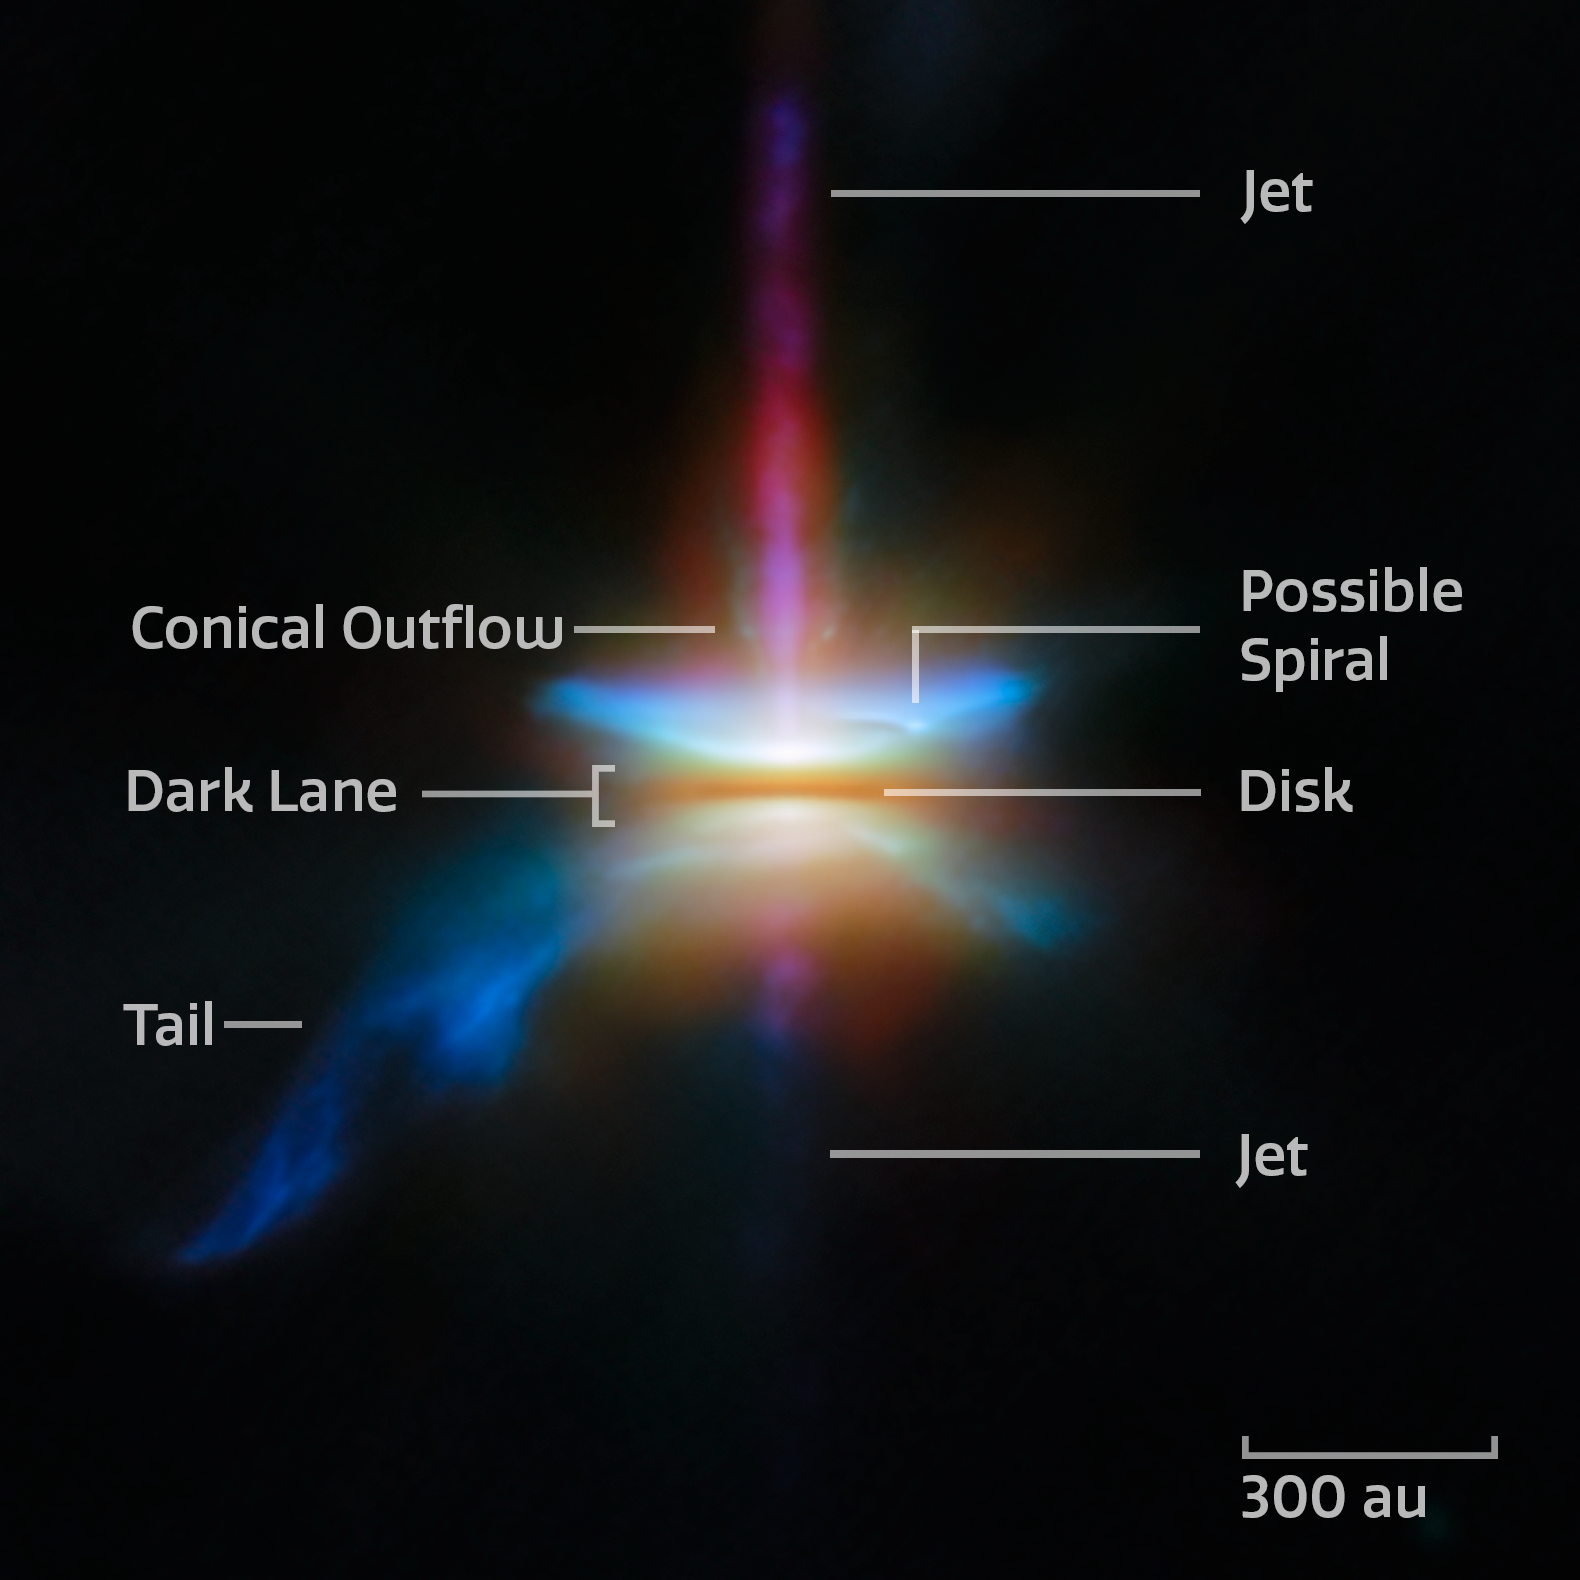

Webb spies a multifaceted disc

This new NASA/ESA/CSA James Webb Space Telescope Picture of the Month presents HH 30 in unprecedented resolution. This target is an edge-on protoplanetary disc that is surrounded by jets and a disc wind, and is located in the dark cloud LDN 1551 in the Taurus Molecular Cloud.

Herbig-Haro objects are small nebulae found in star formation regions, marking the locations where gas outflowing from young stars is heated into luminescence by shockwaves. HH 30 is an example of where this outflowing gas takes the form of a narrow jet. The source star is located on one end of the jet, hidden behind an edge-on protoplanetary disc that the star is illuminating.

HH 30 is of particular interest to astronomers. In fact, the HH 30 disc is considered the prototype of an edge-on disc, thanks to its early discovery with the NASA/ESA Hubble Space Telescope. Discs seen from this view are a unique laboratory to study the settling and drift of dust grains.

An international team of astronomers have used Webb to investigate the target in unprecedented detail. By combining Webb’s observations with those from the Hubble Space Telescope and the Atacama Large Millimeter/submillimeter Array (ALMA), the team was able to study the multiwavelength disc appearance of the system and its dynamic structures.

These Webb observations were taken as part of the Webb GO programme #2562 (PI F. Ménard, K. Stapelfeldt), which aims to understand how dust evolves in edge-on discs like HH 30. Combined with the keen radio-wavelength eyes of ALMA, these observations show that large dust grains must migrate within the disc and settle in a thin layer. The creation of a narrow, dense layer of dust is an important stage in the process of planet formation. In this dense region, dust grains clump together to form pebbles and eventually planets themselves.

In addition to the behaviour of dust grains, the Webb, Hubble, and ALMA images reveal several distinct structures that are nested within one another. Emerging at a 90-degree angle from the narrow central disc is a high-velocity jet of gas. The Webb data showed that clumps of gas within the jet are moving at 121 kilometres per second. The narrow jet is surrounded by a wider, cone-shaped outflow. Enclosing the conical outflow is a broad nebula that reflects the light from the young star that is embedded within the disc. This structure shows a hint of a spiral, similar to what is seen in other young protoplanetary discs, as well as a ‘tail’-like feature that extends to one side. While the origins of these features have yet to be determined, together they reveal HH 30 to be a dynamic site of planet formation.

Credit: ESA/Webb, NASA & CSA, Tazaki et al.